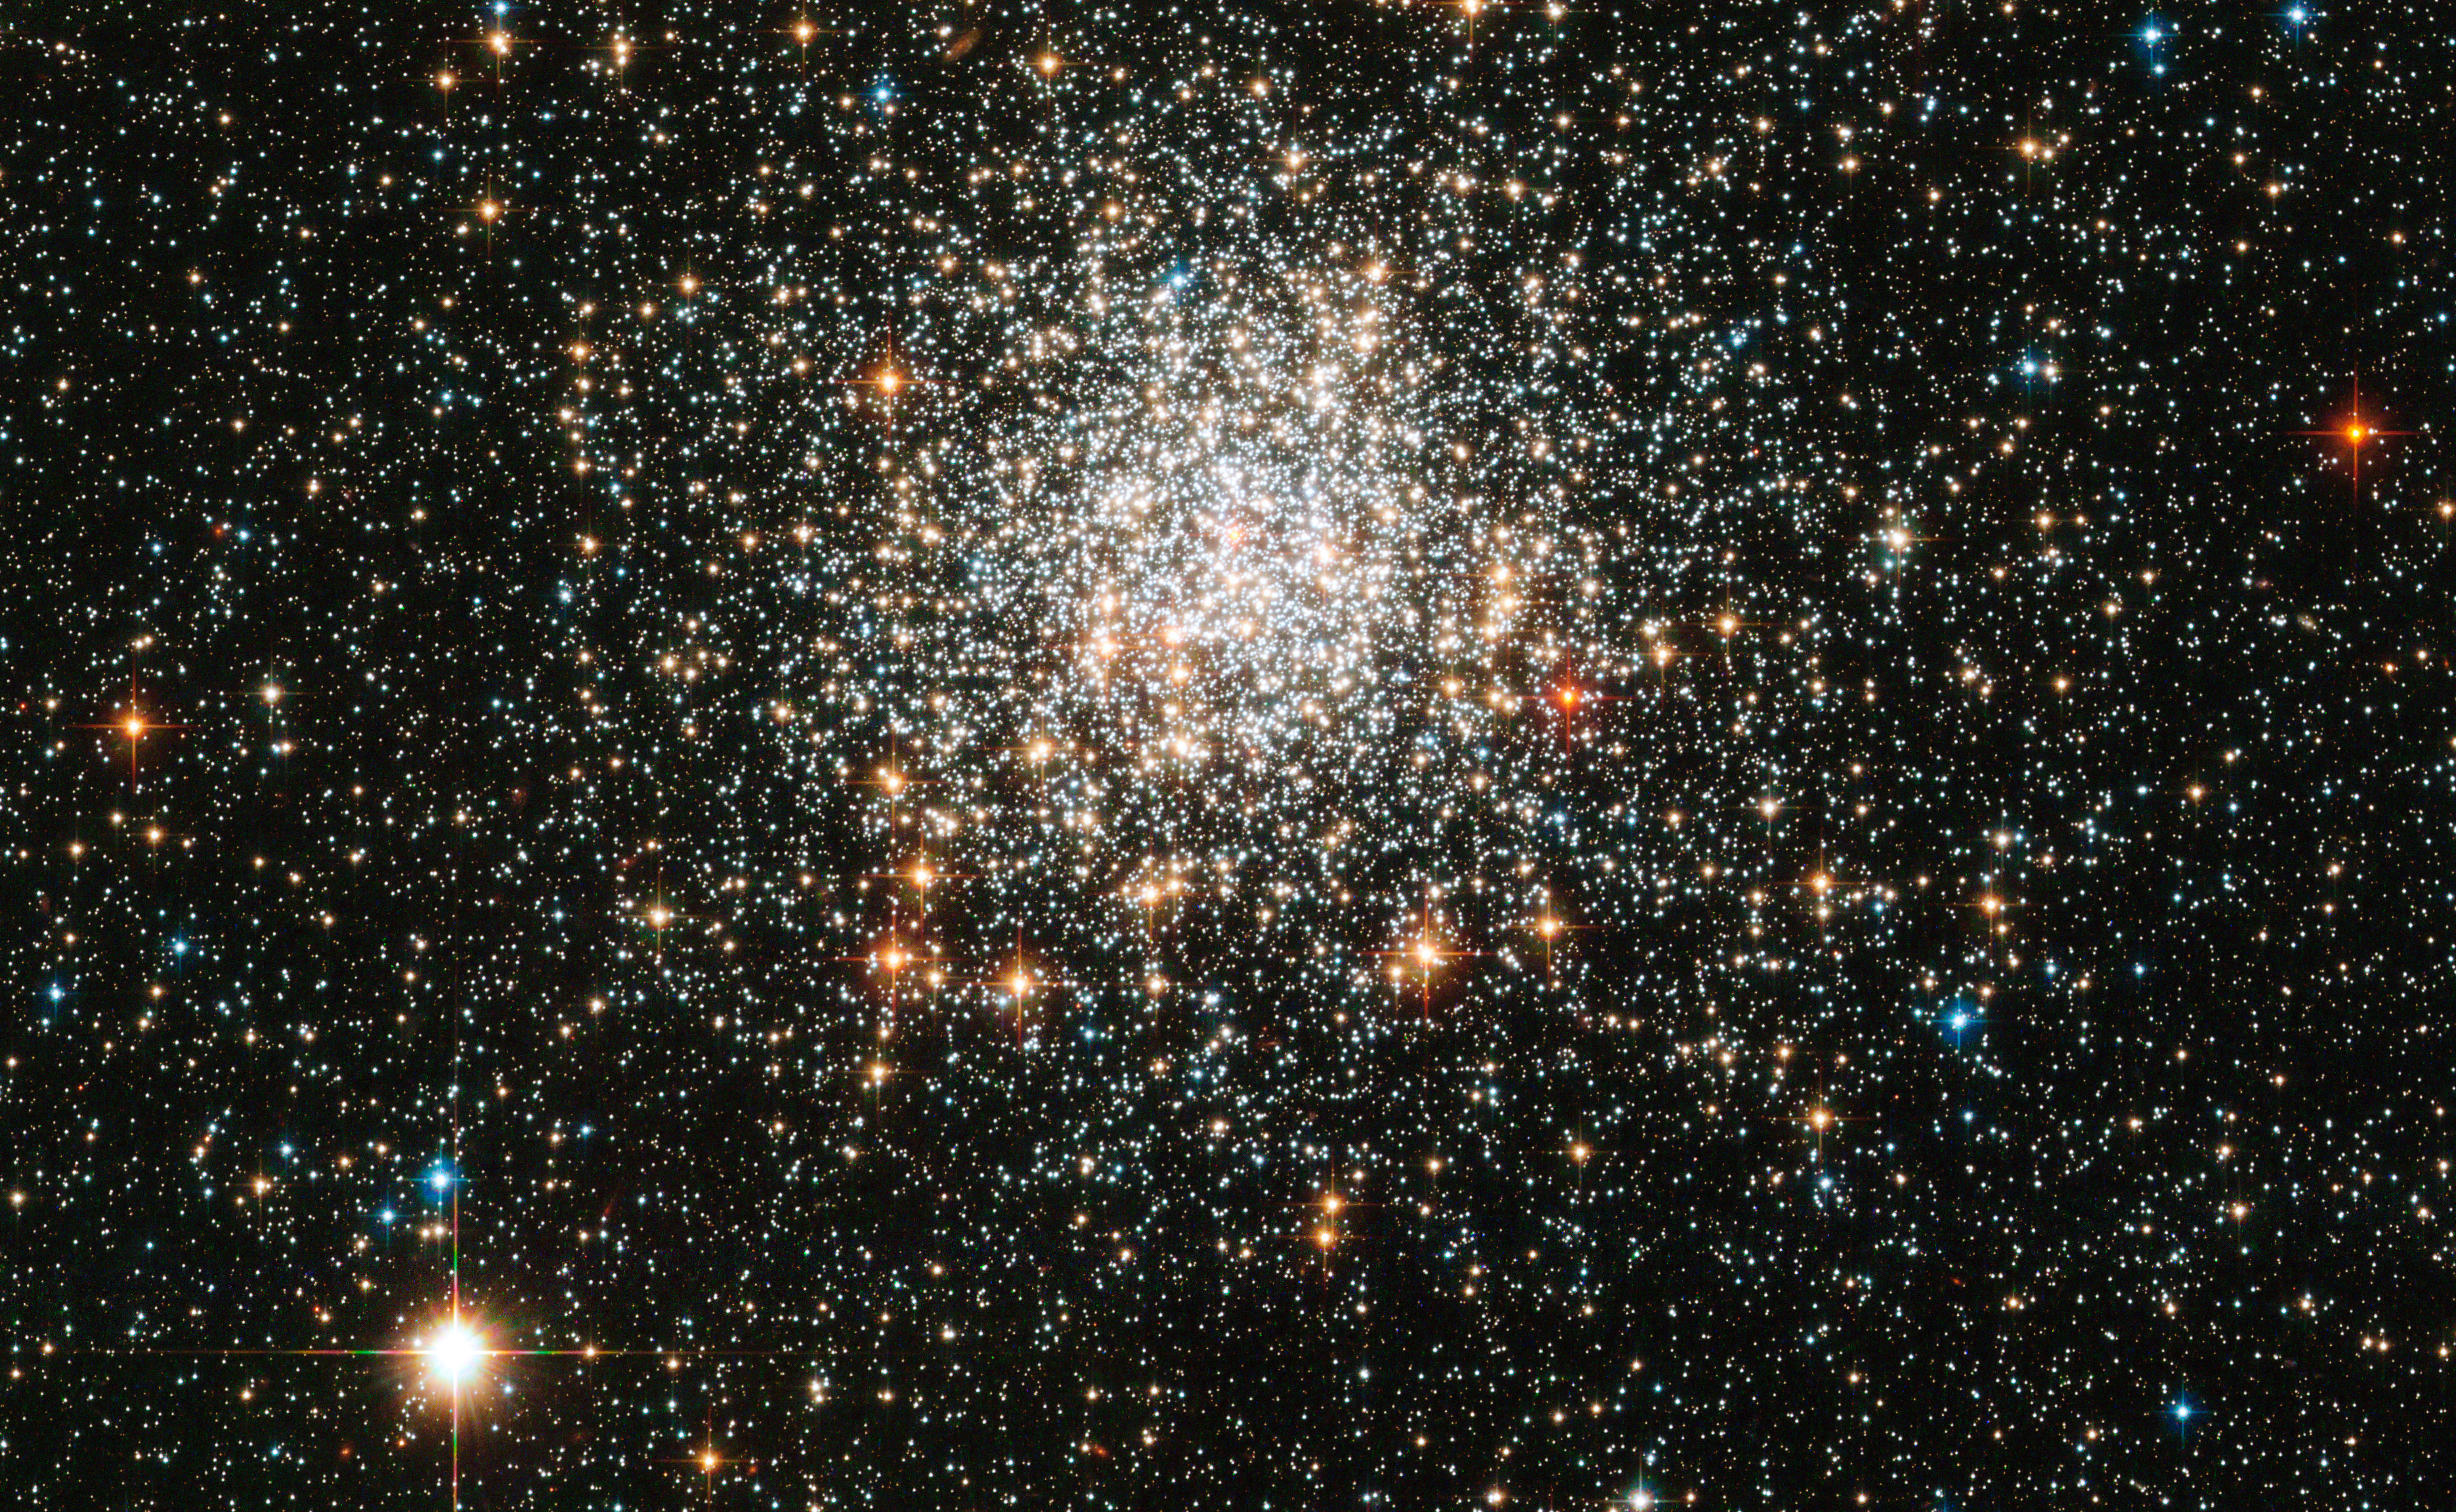

A great ball of stars

The NASA/ESA Hubble Space Telescope has turned its sharp eye towards a tight collection of stars, first seen 174 years ago. The result is a sparkling image of NGC 1806, tens of thousands of stars gravitationally bound into a rich cluster. Commonly called globular clusters, most of these objects are very old, having formed in the distant past when the Universe was only a fraction of its current age. NGC 1806 lies within the Large Magellanic Cloud, a satellite galaxy of our own Milky Way. It can be observed within the constellation of Dorado (the dolphin-fish), an area of the sky best seen from the Earth’s southern hemisphere.

NGC 1806 was discovered in 1836 by the British astronomer John Herschel. He had travelled to South Africa in order to catalogue astronomical objects visible best from southern latitudes, and thereby complete work begun by his father William, the man who coined the term “globular cluster”. Using a large telescope John Herschel carefully scanned the night sky and noted objects of interest, of which NGC 1806 was one. In the same year that he documented NGC 1806 he was visited by the naturalist Charles Darwin after the HMS Beagle stopped over in Cape Town. Darwin later referred to John Herschel as “one of our greatest philosophers”.

The Wide Field Channel of Hubble's Advanced Camera for Surveys was used to obtain this picture that was created from images taken through blue (F435W, coloured blue), yellow (F555W, coloured green) and near-infrared (F814W, coloured red) filters. The exposure times were 770 s, 720 s and 688 s, respectively, and the field of view is 3.1 by 1.9 arcminutes. Surely Herschel, who made great contributions to the sciences of both astronomy and photography, would have been immensely impressed by this glittering Hubble picture

Credit: ESA/Hubble & NASA